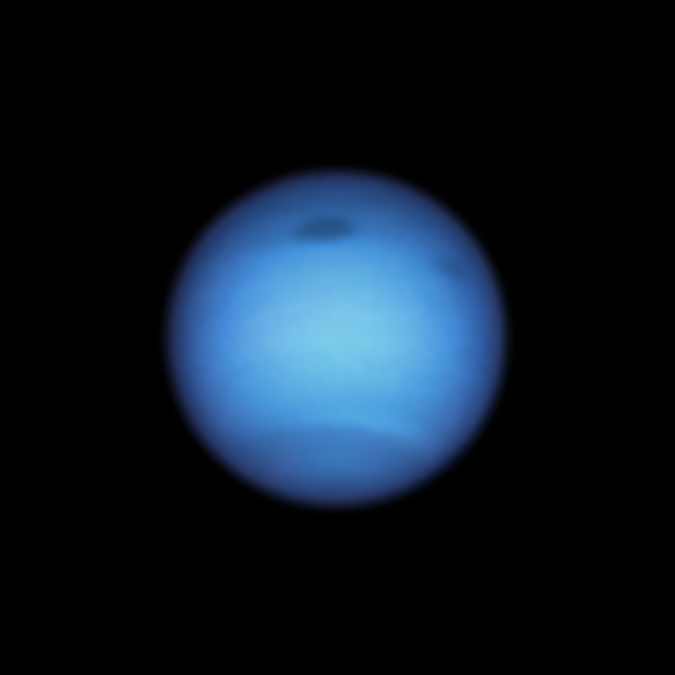

Neptune’s Curious Dark Spots

Astronomers using the NASA/ESA Hubble Space Telescope watched a mysterious dark vortex on Neptune abruptly steer away from a likely death on the giant blue planet.

The storm, which is wider than the Atlantic Ocean, was born in the planet's northern hemisphere and discovered by Hubble in 2018. Observations a year later showed that it began drifting southward toward the equator, where such storms are expected to vanish from sight. To the surprise of observers, Hubble spotted the vortex change direction by August 2020, doubling back to the north. Though Hubble has tracked similar dark spots over the past 30 years, this unpredictable atmospheric behavior is something new to see.

Equally as puzzling, the storm was not alone. Hubble spotted another smaller dark spot in January this year that temporarily appeared near its larger cousin. It might possibly have been a piece of the giant vortex that broke off, drifted away, and then disappeared in subsequent observations.

Credit: NASA, ESA, STScI, M.H. Wong (University of California, Berkeley) and L.A. Sromovsky and P.M. Fry (University of Wisconsin-Madison)